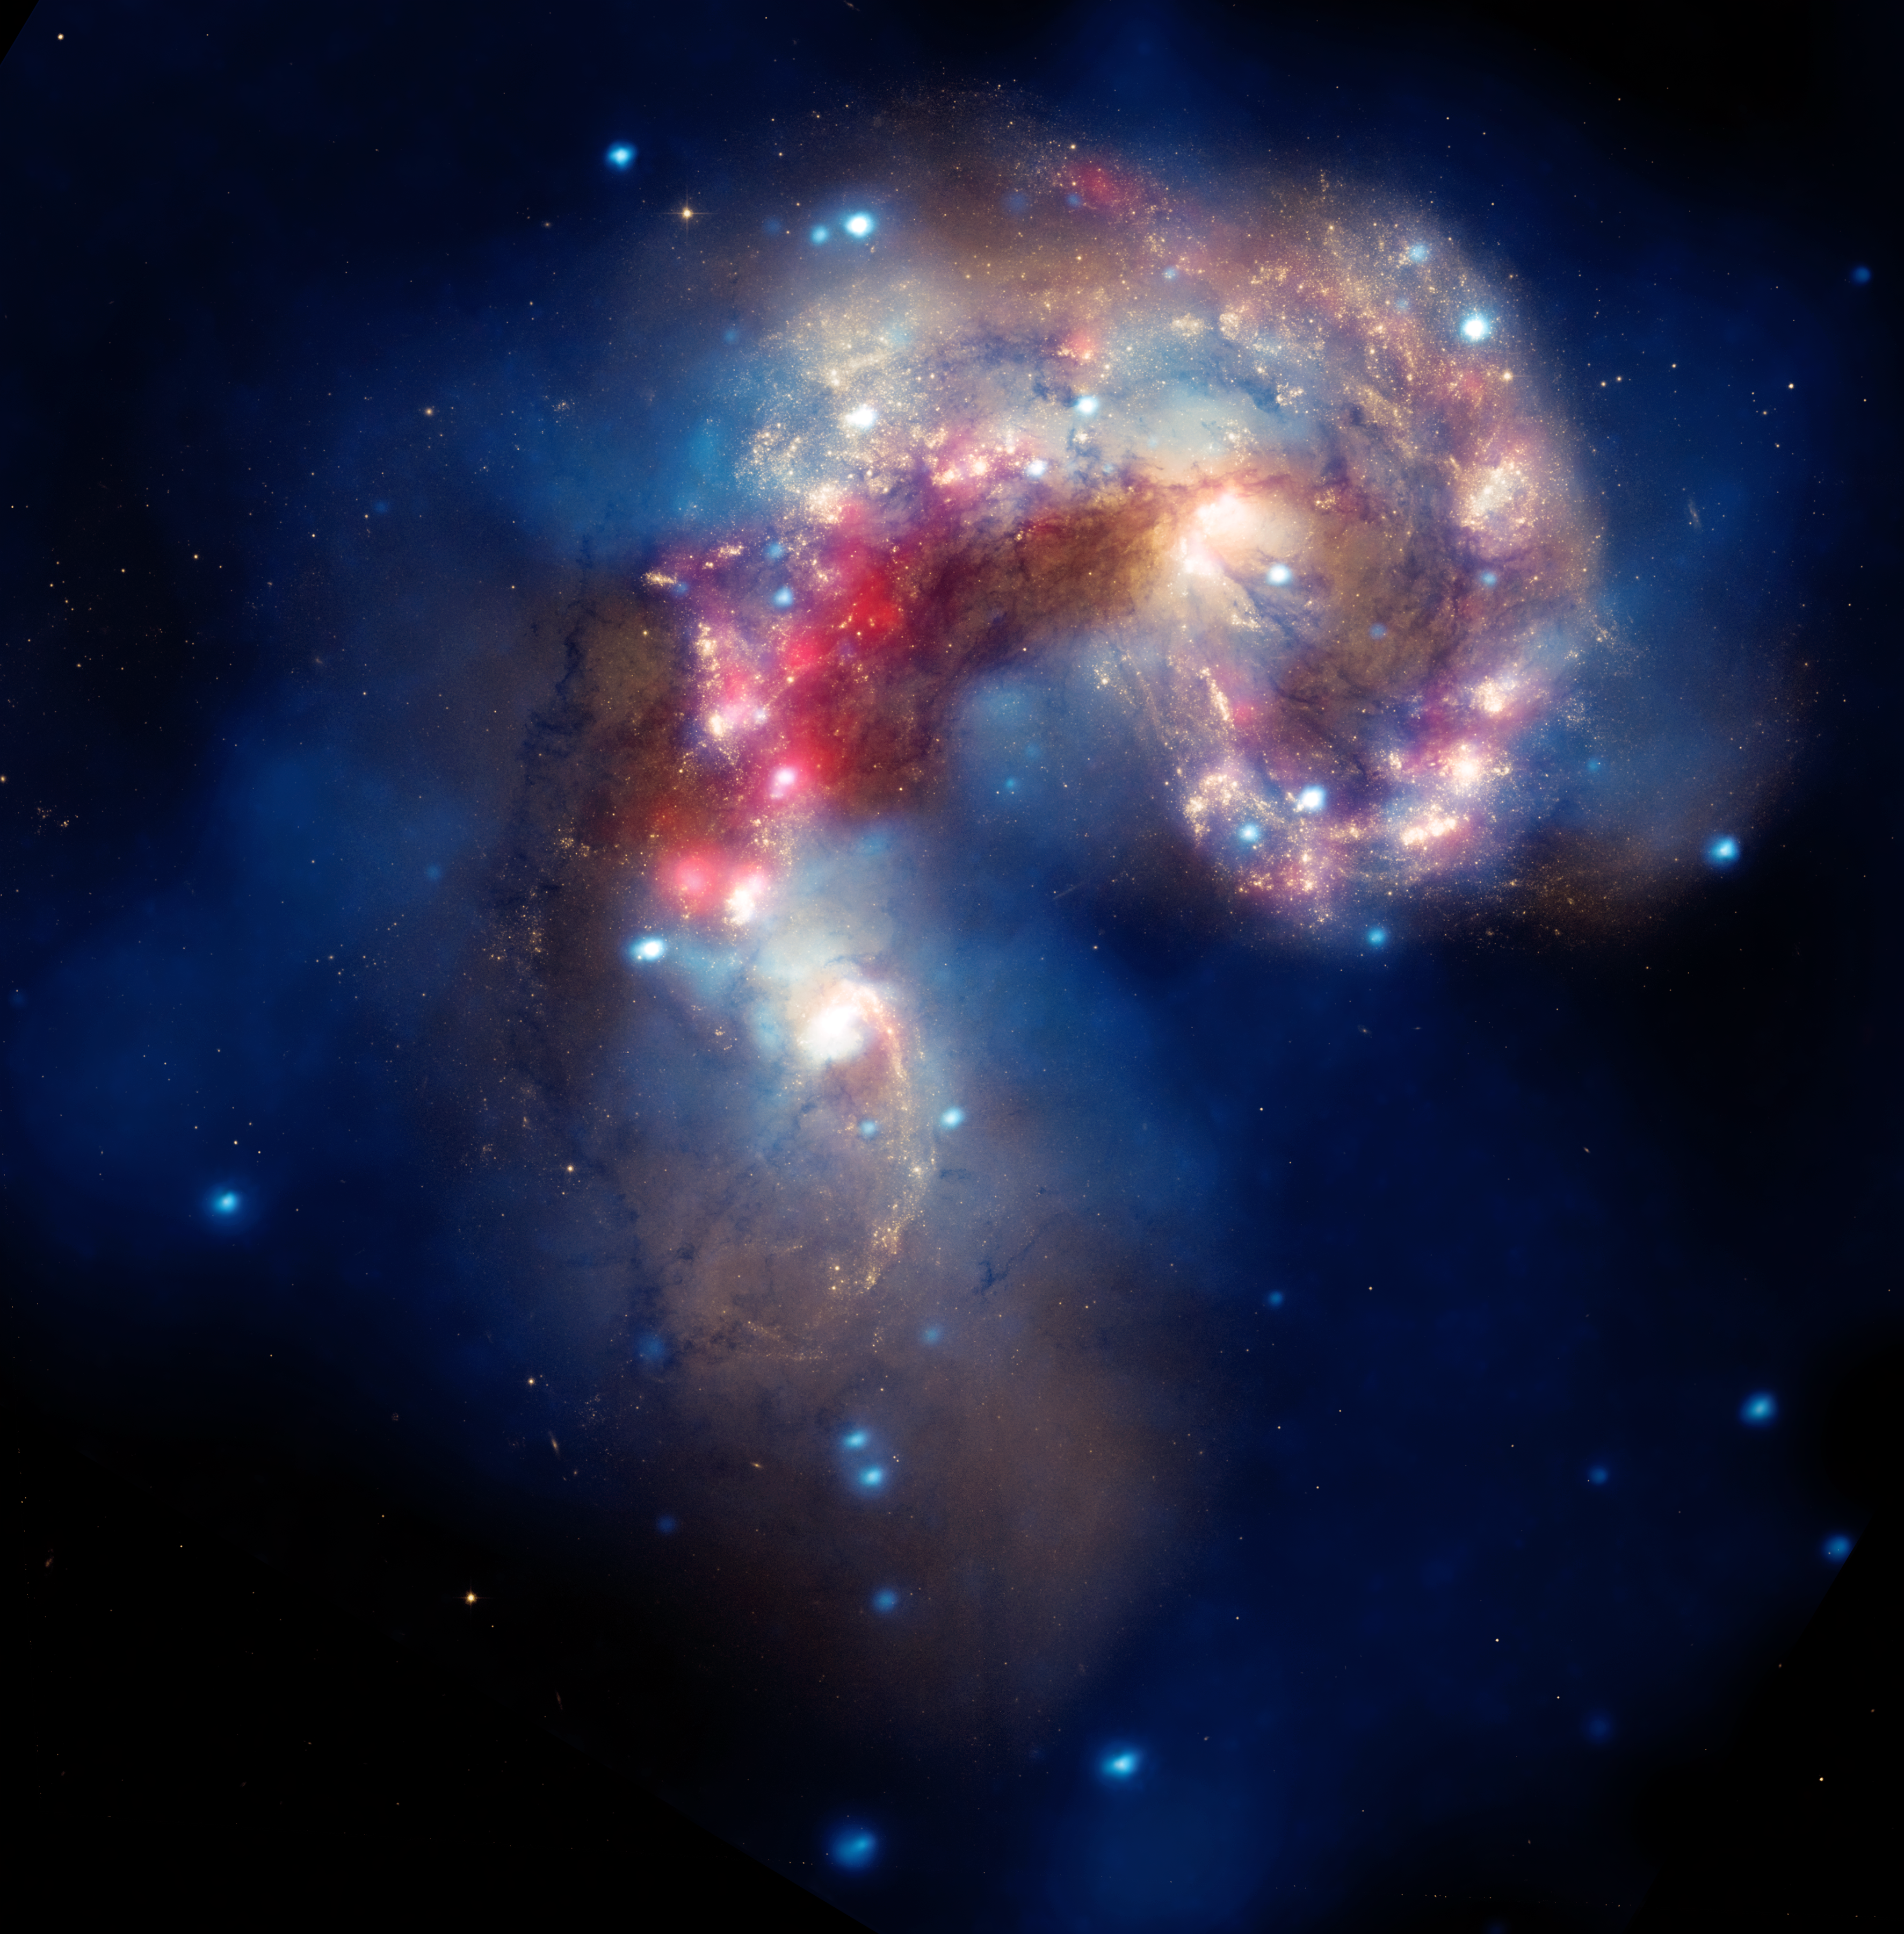

A Galactic spectacle

A beautiful new image of two colliding galaxies has been released by NASA's Great Observatories. The Antennae galaxies, located about 62 million light-years from Earth, are shown in this composite image from the Chandra X-ray Observatory (blue), the Hubble Space Telescope (gold and brown), and the Spitzer Space Telescope (red). The Antennae galaxies take their name from the long antenna-like "arms," seen in wide-angle views of the system. These features were produced by tidal forces generated in the collision.

The collision, which began more than 100 million years ago and is still occurring, has triggered the formation of millions of stars in clouds of dusts and gas in the galaxies. The most massive of these young stars have already sped through their evolution in a few million years and exploded as supernovae.

The X-ray image from Chandra shows huge clouds of hot, interstellar gas that have been injected with rich deposits of elements from supernova explosions. This enriched gas, which includes elements such as oxygen, iron, magnesium, and silicon, will be incorporated into new generations of stars and planets. The bright, point-like sources in the image are produced by material falling onto black holes and neutron stars that are remnants of the massive stars. Some of these black holes may have masses that are almost one hundred times that of the Sun.

The Spitzer data show infrared light from warm dust clouds that have been heated by newborn stars, with the brightest clouds lying in the overlapping region between the two galaxies.

The Hubble data reveal old stars and star-forming regions in gold and white, while filaments of dust appear in brown. Many of the fainter objects in the optical image are clusters containing thousands of stars.

The Chandra image was taken in December 1999. The Spitzer image was taken in December 2003. The Hubble image was taken in July 2004, and February 2005.

Credit: NASA, ESA, SAO, CXC, JPL-Caltech, and STScI. Acknowledgment: G. Fabbiano and Z. Wang (Harvard-Smithsonian CfA, USA), and B. Whitmore (STScI)